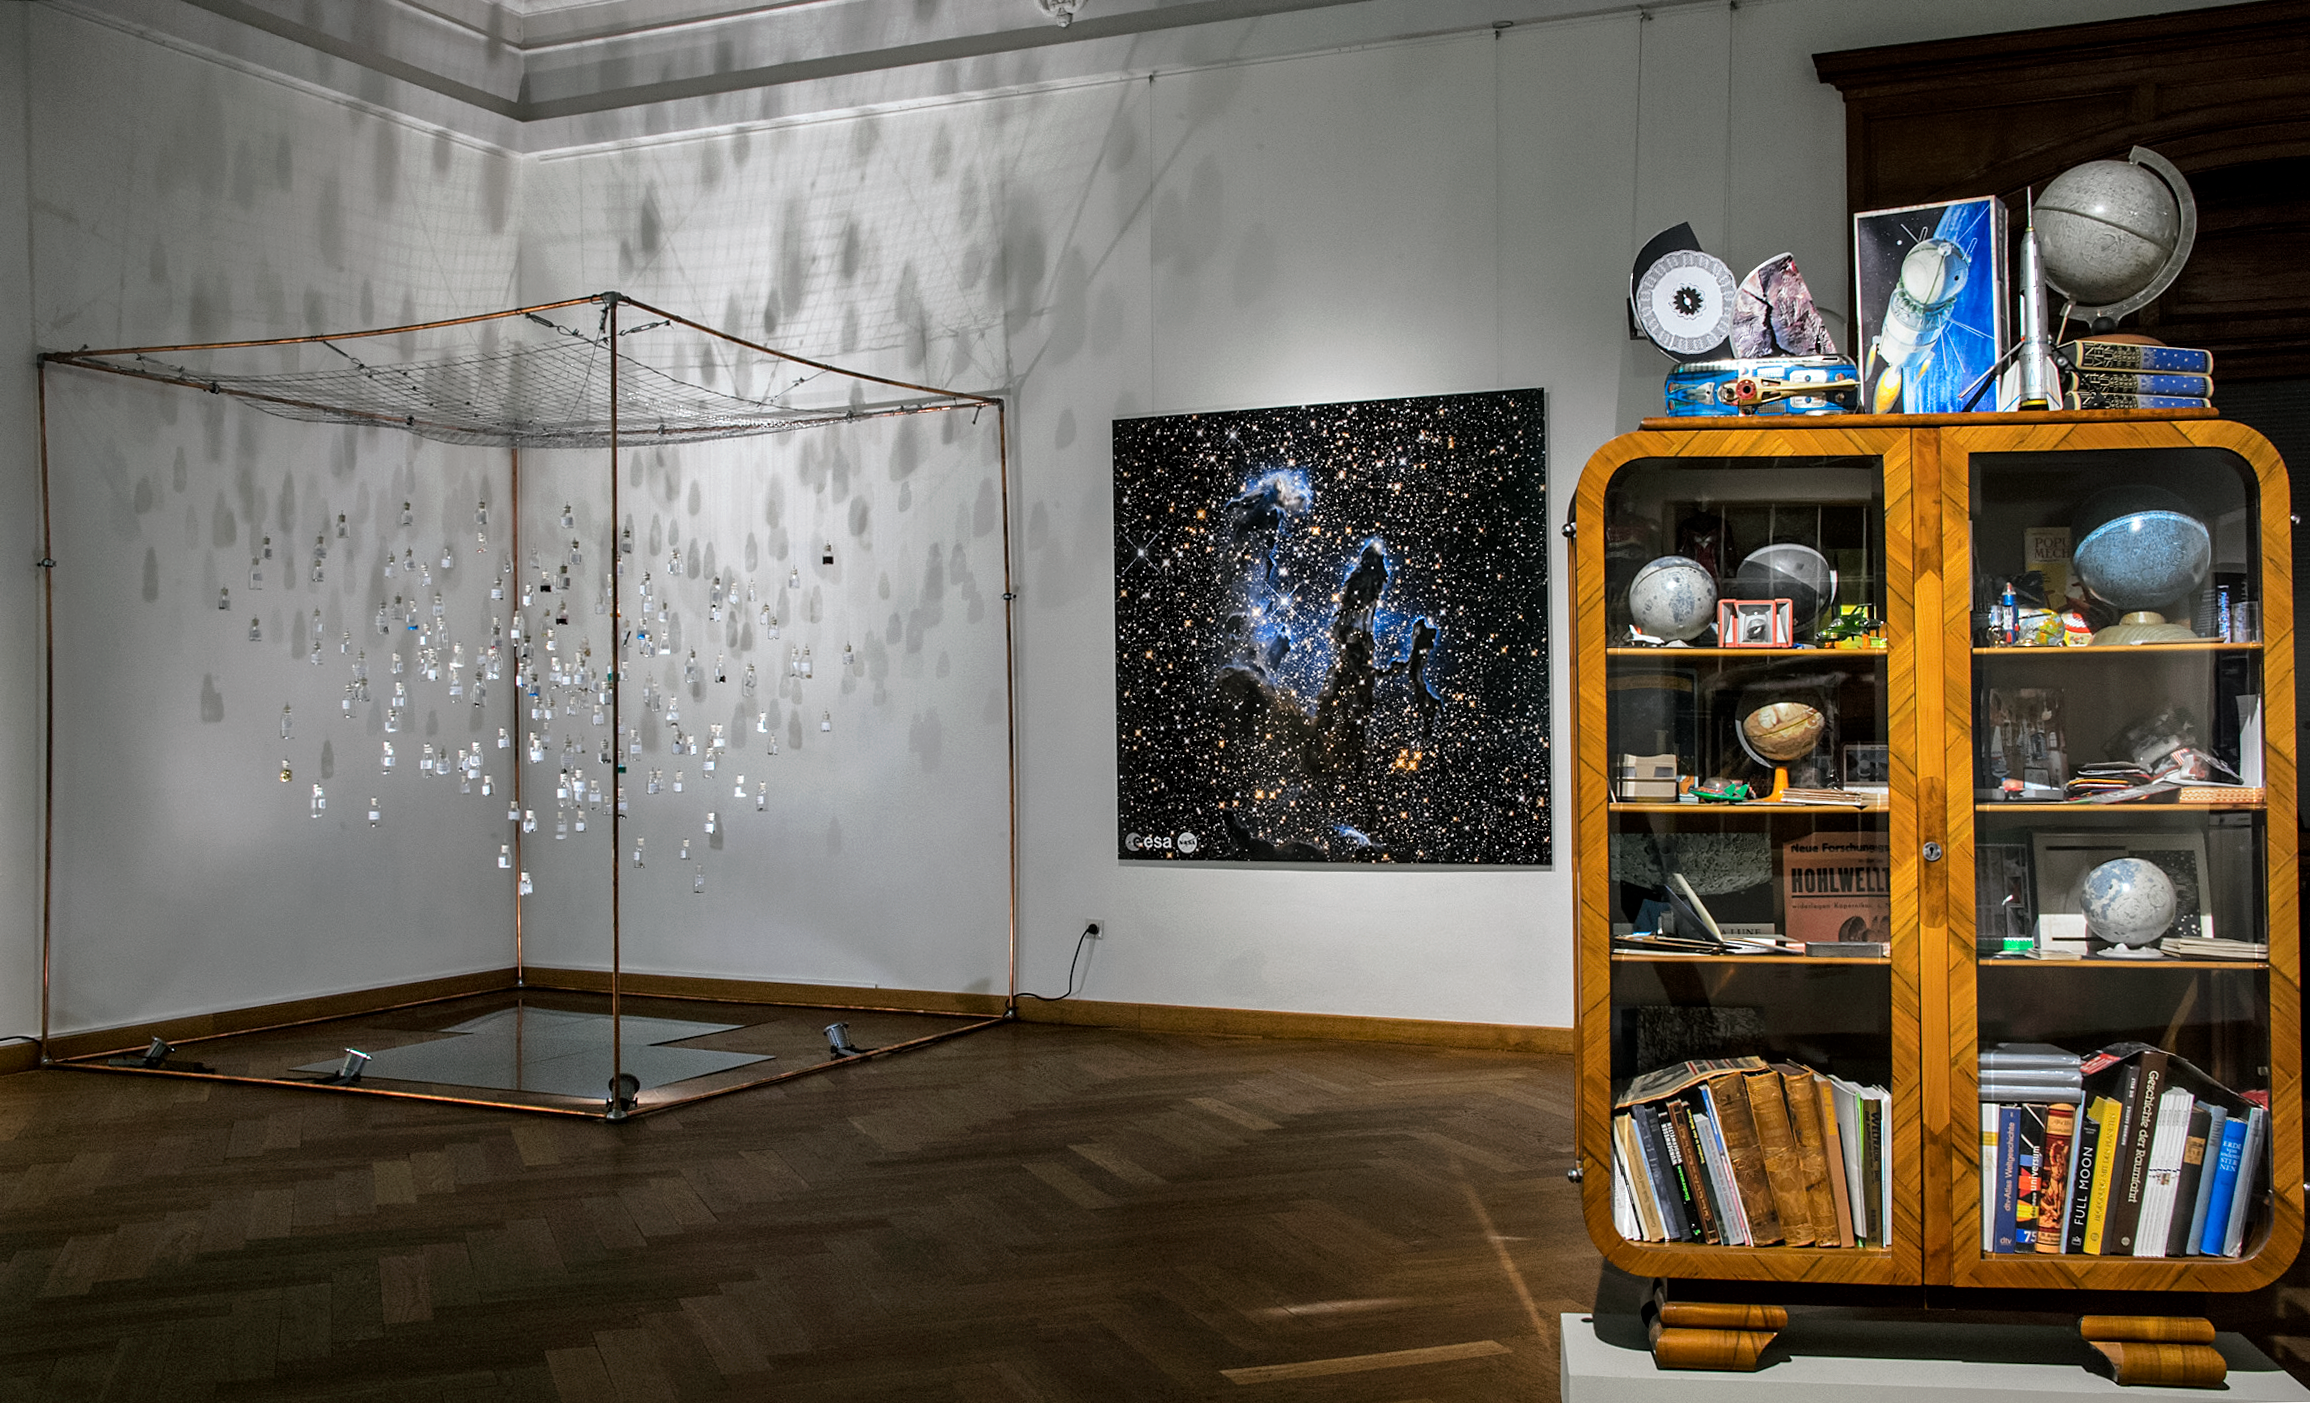

Our Place in Space —Wunderkammer & Our Celestial Bodies

Nive Widauer's artistic work (to the right) focuses on the relationship between the microcosm of our planet and the surrounding macrocosm of space — and vice versa. The installation "Wunderkammer/Challended" unites an Art Deco showcase full of personal collectables that documents Widauer's lifelong fascination with space. It provides a museum-voyeuristic insight into the artist's very private exploration and palpation of her relationship to space, its meteorites, stars, and planets.

With Our Celestial Bodies (background left), the artist Daniela Brill Estrada explores the similarities between human and cosmic bodies — the origin of those elements that connect us humans with the Universe. The installation offers an alternative approach to the scientific concept of the formation and arrangement of chemical elements. These are captured in a cloud of 200 small glass bottles representing all the elements in various states and hanging in front of the Pillars of Creation. The artistic work deals with the chemical similarities and at the same time questions the differences between the individual reality of the viewer and the universe, its origin, beauty and size.

This art was on display in the Hubble travelling exhibition Our Place in Space in Vienna.

Credit: NHM Wien, Kurt Kracher